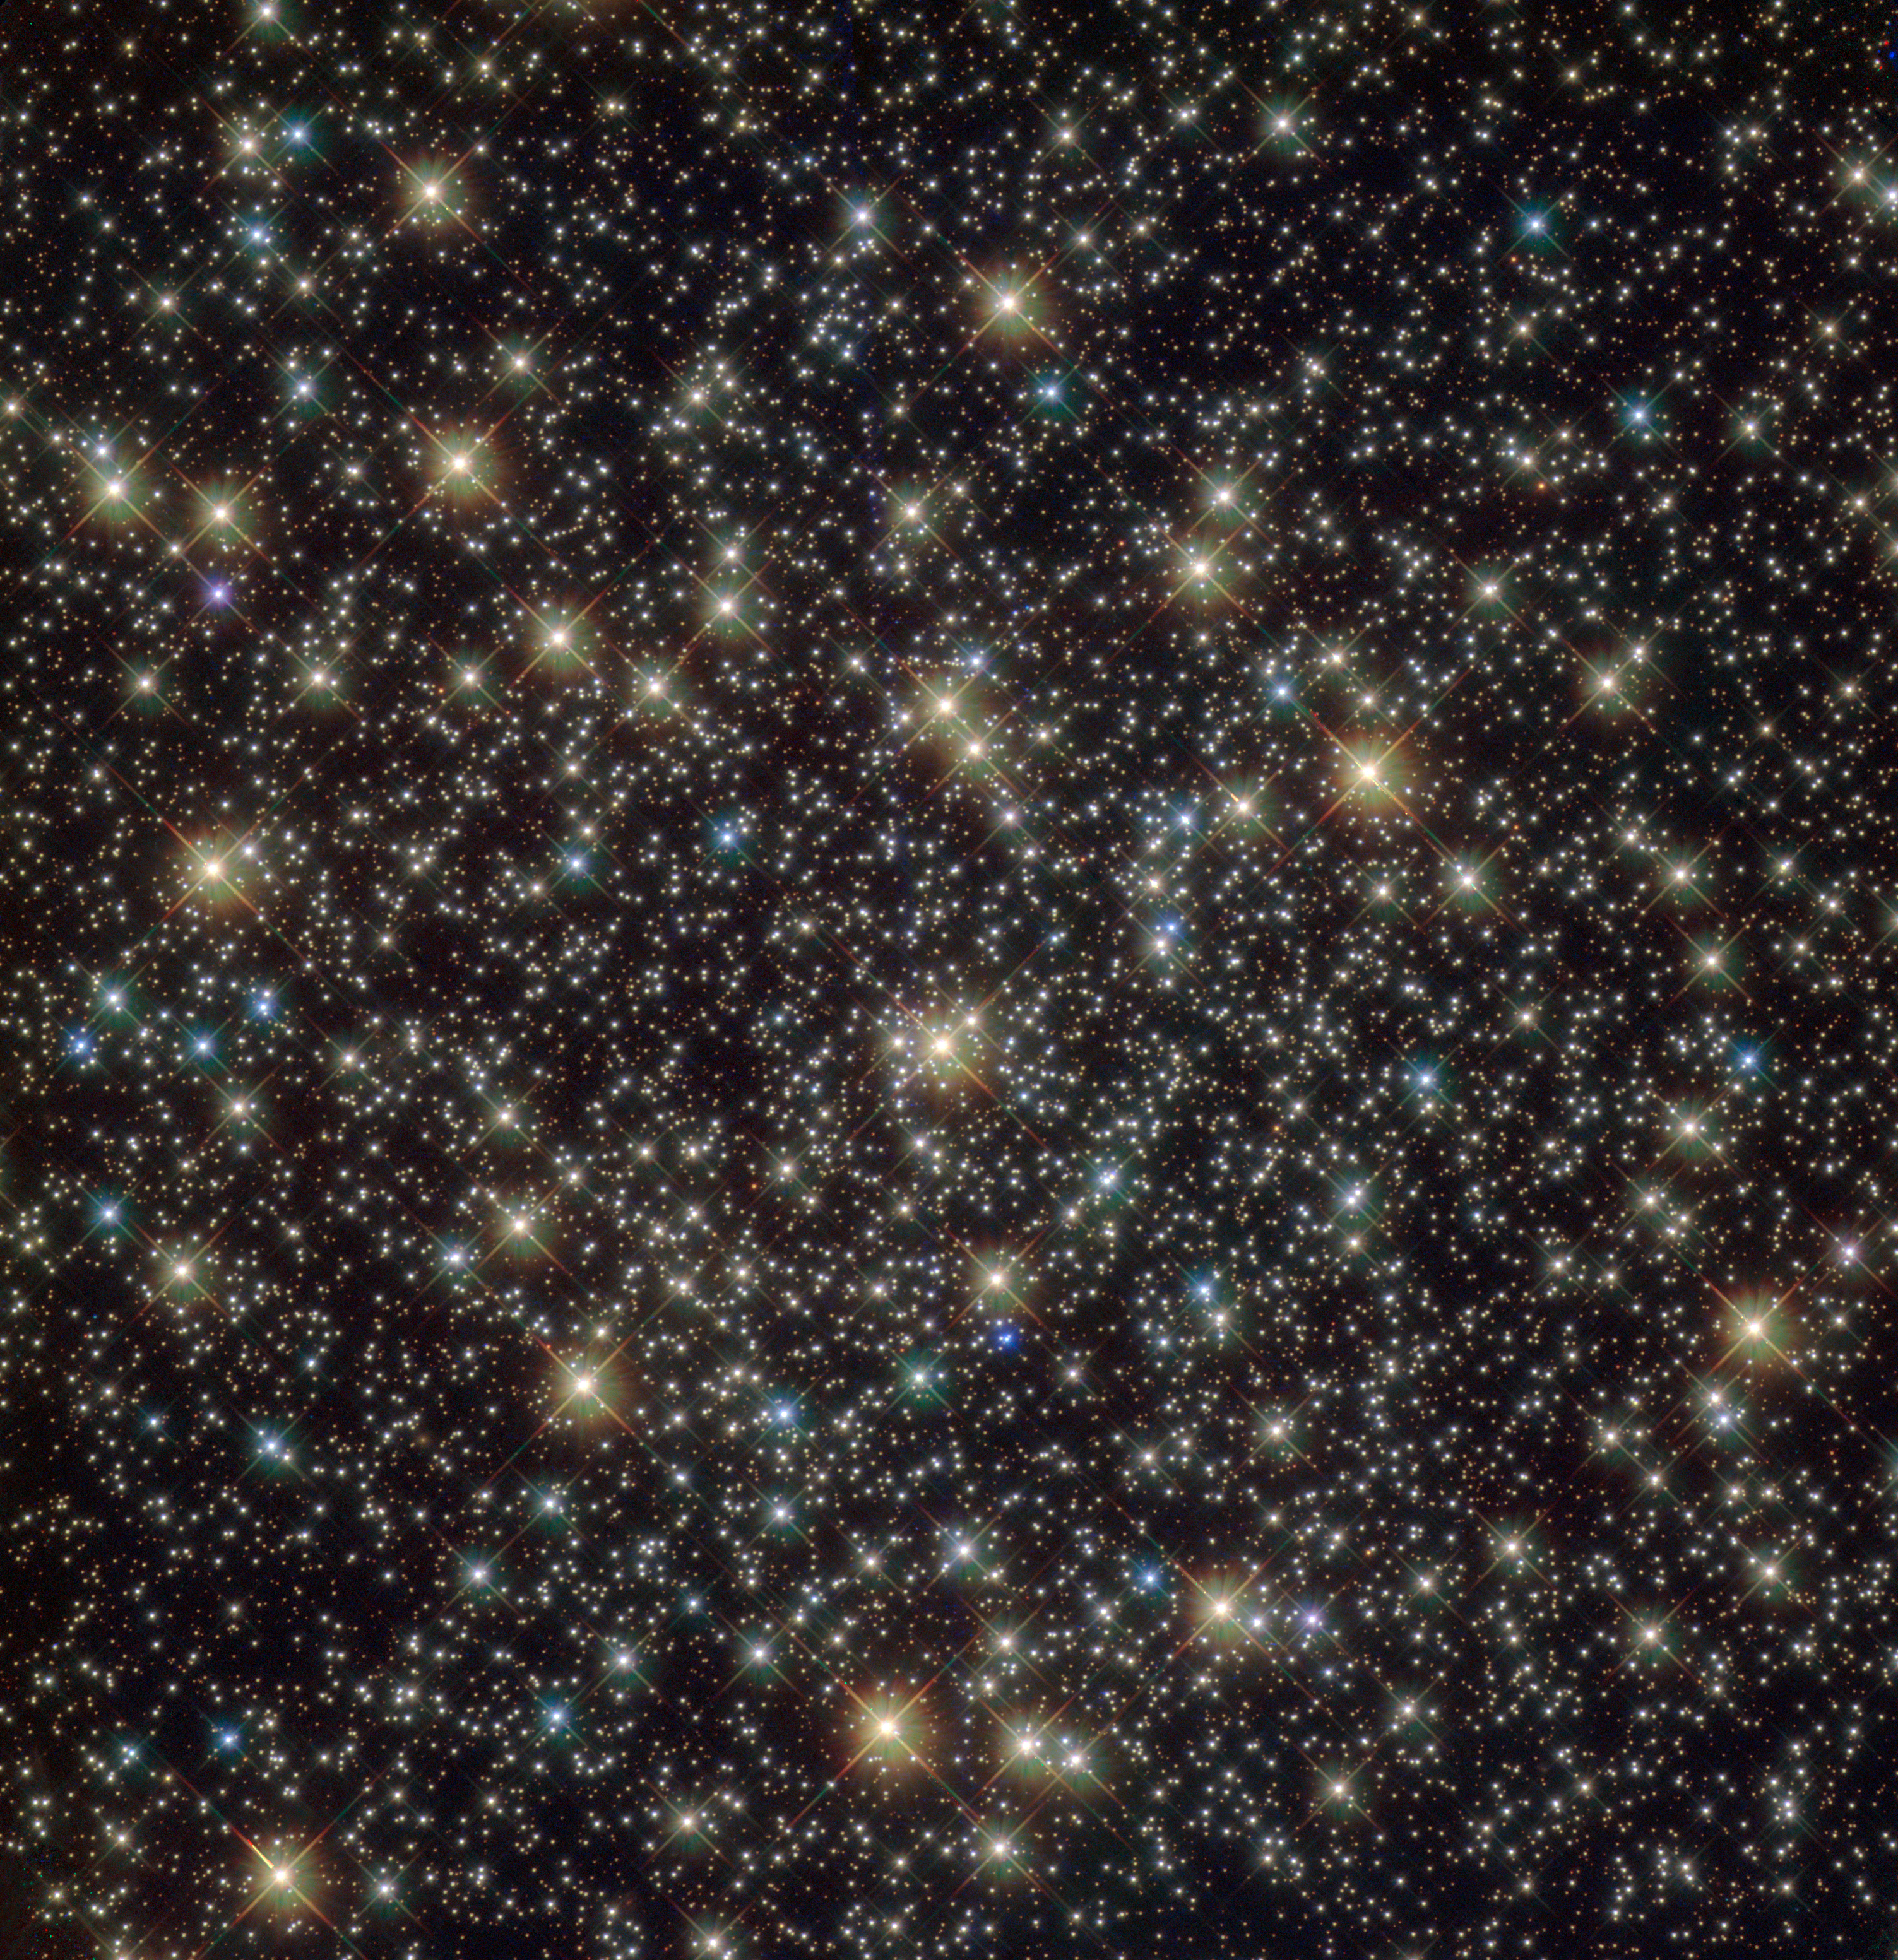

Standout stars

This image from the NASA/ESA Hubble Space Telescope reveals a glistening and ancient globular cluster named NGC 3201 — a gathering of hundreds of thousands of stars bound together by gravity. NGC 3201 was discovered in 1826 by the Scottish astronomer James Dunlop, who described it as a “pretty large, pretty bright” object that becomes “rather irregular” towards its centre.

Globular clusters are found around all large galaxies, but their origin and role in galaxy formation remain tantalisingly unclear. Astronomers recently discovered a black hole lurking at the heart of NGC 3201 — its position was revealed by the strange movements of a star being quickly flung around a massive, invisible counterpart. This sparkling group of stars also has some strange properties which make it unique amongst the over 150 globular clusters belonging to the Milky Way. NGC 3201 has an extremely fast velocity with respect to the Sun and its orbit is retrograde, meaning that it moves speedily in the opposite direction to the galactic centre, which it orbits.

The unusual behaviour of this cluster suggests that it may have extragalactic origins, but at some point was captured by the Milky Way’s gravity. However, the chemical makeup of this intriguing cluster tells a different story — the stars within NGC 3201 are chemically very similar to those of other galactic globular clusters, implying that they formed at a similar location and time to their neighbours.

Whether this mysterious cluster was adopted by our galaxy or has for some reason evolved very differently to the family of clusters it grew up with, it is certainly an unusual astronomical beauty.

Acknowledgement: Sarajedini et al.

Credit: ESA/Hubble & NASA